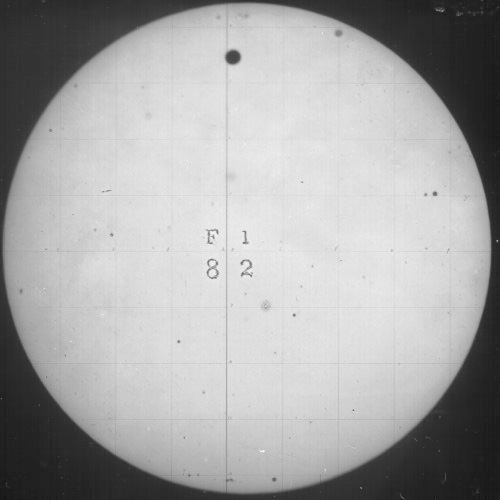

1882 transit of Venus

Venus is seen as a small dot, as it transits the Sun. This photo was taken in 1882 by the US Naval Observatory.

Credit: U.S. Naval Observatory